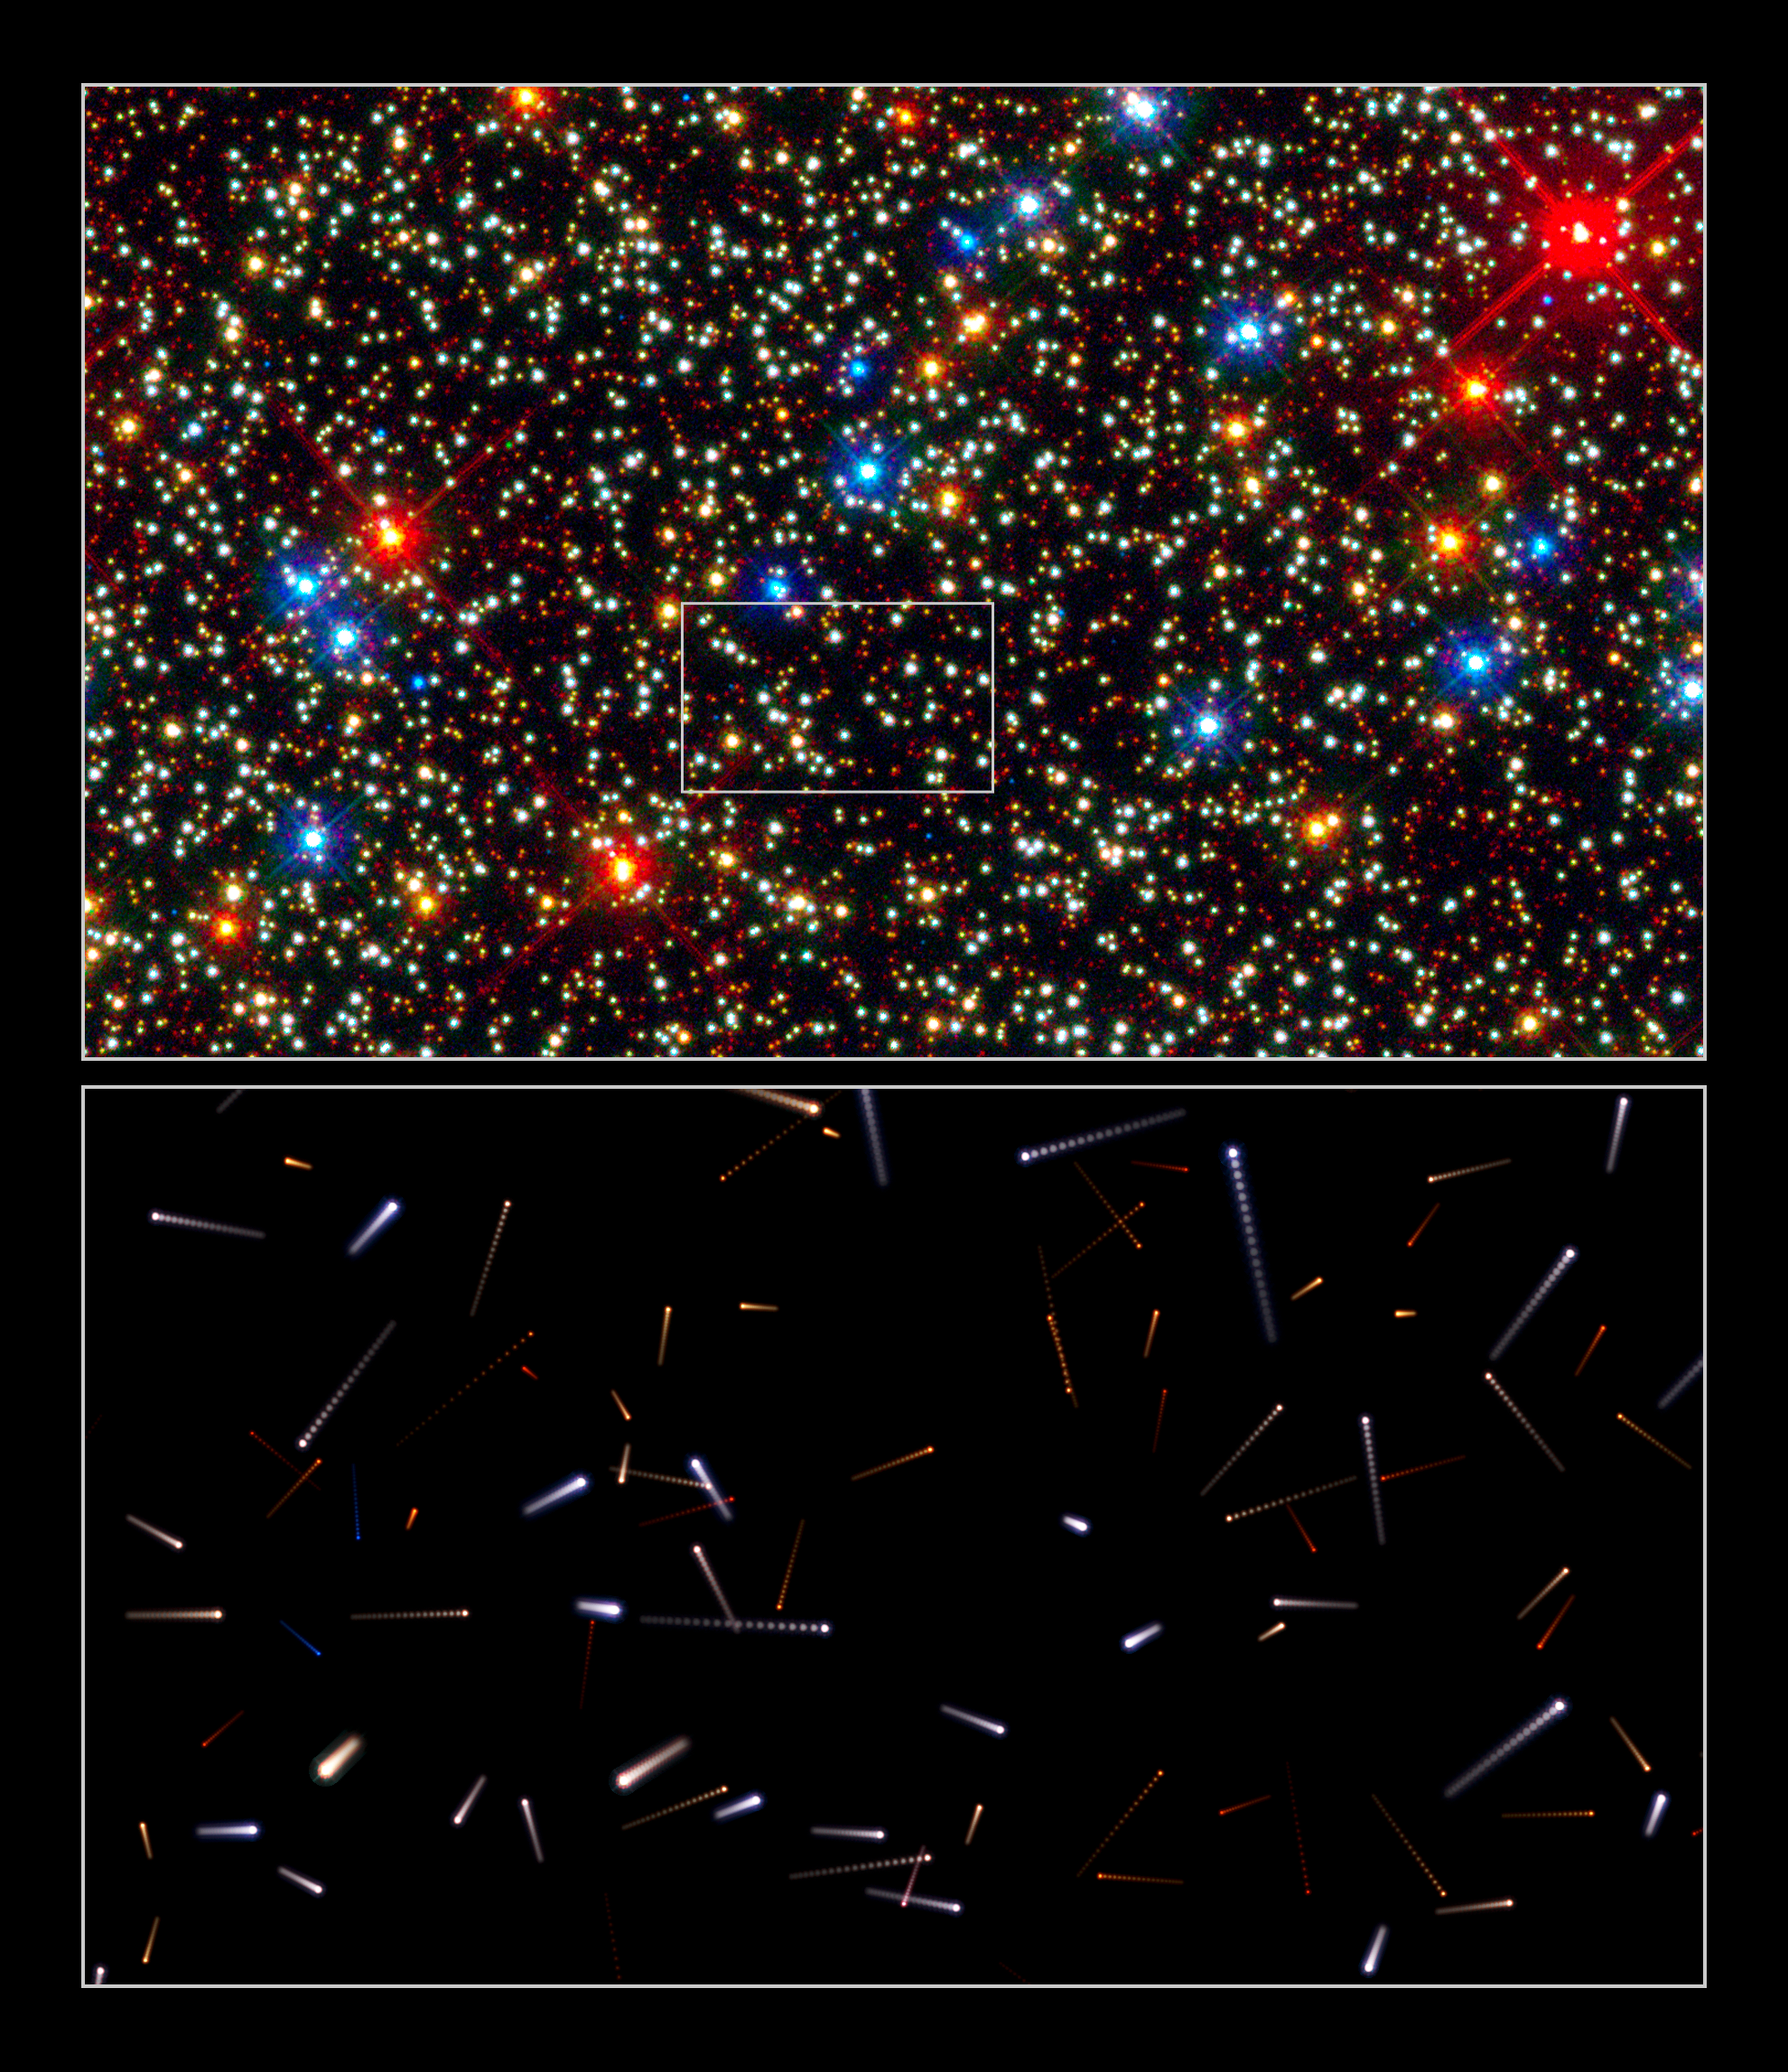

Using Hubble to chart the future motions of stars within a cluster

The multi-colour snapshot (top), taken with the Wide Field Camera 3 aboard the NASA/ESA Hubble Space Telescope, captures the central region of the giant globular cluster Omega Centauri. All the stars in the image are moving in random directions, like a swarm of bees. Astronomers used Hubble’s exquisite resolving power to measure positions for stars in 2002 and 2006.

From these measurements, they can predict the stars’ future movement. The lower illustration charts the future positions of the stars highlighted by the white box in the top image. Each streak represents the motion of the stars over the next 600 years. The motion between the dots corresponds to 30 years.

Credit: NASA, ESA, J. Anderson and R. van der Marel (STScI)